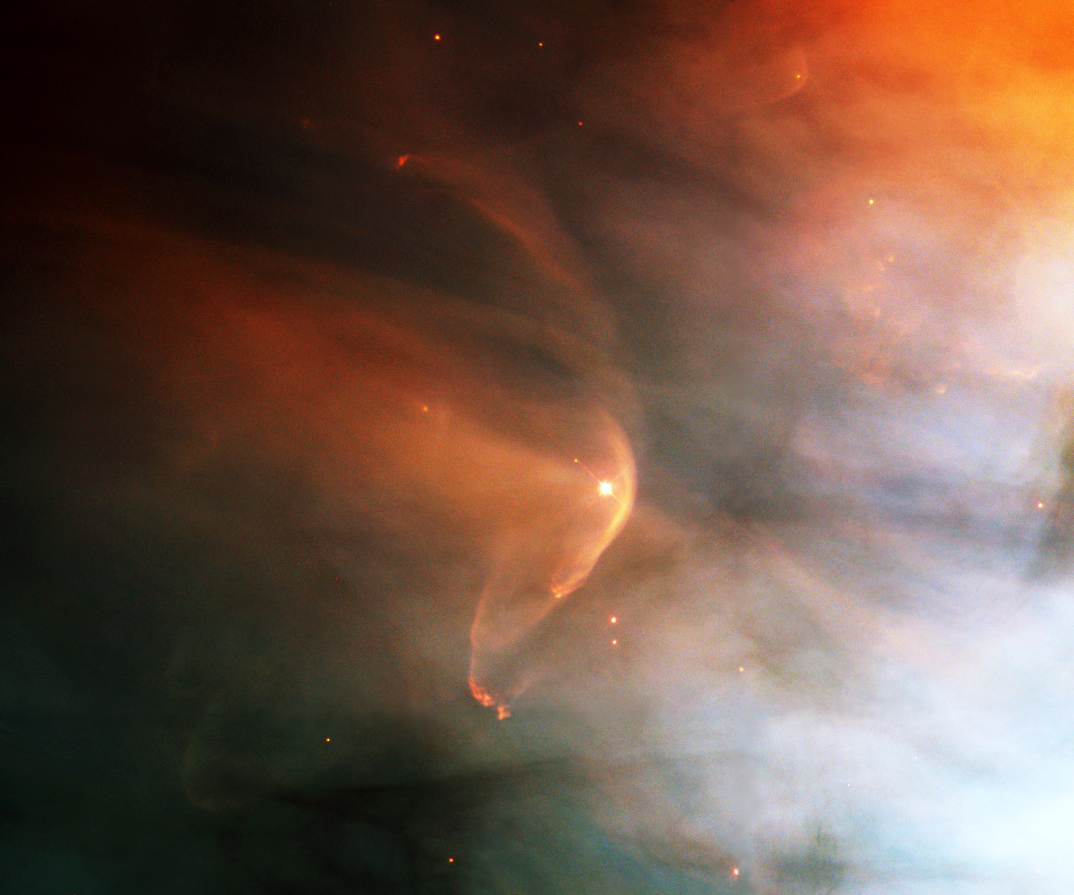

A bow shock near a young star

The Hubble Space Telescope continues to reveal various stunning and intricate treasures that reside within the nearby, intense star-forming region known as the Great Nebula in Orion. One such jewel is the bow shock around the very young star, LL Ori, featured in this Hubble Heritage image.

Credit: NASA/ESA and The Hubble Heritage Team (STScI/AURA)